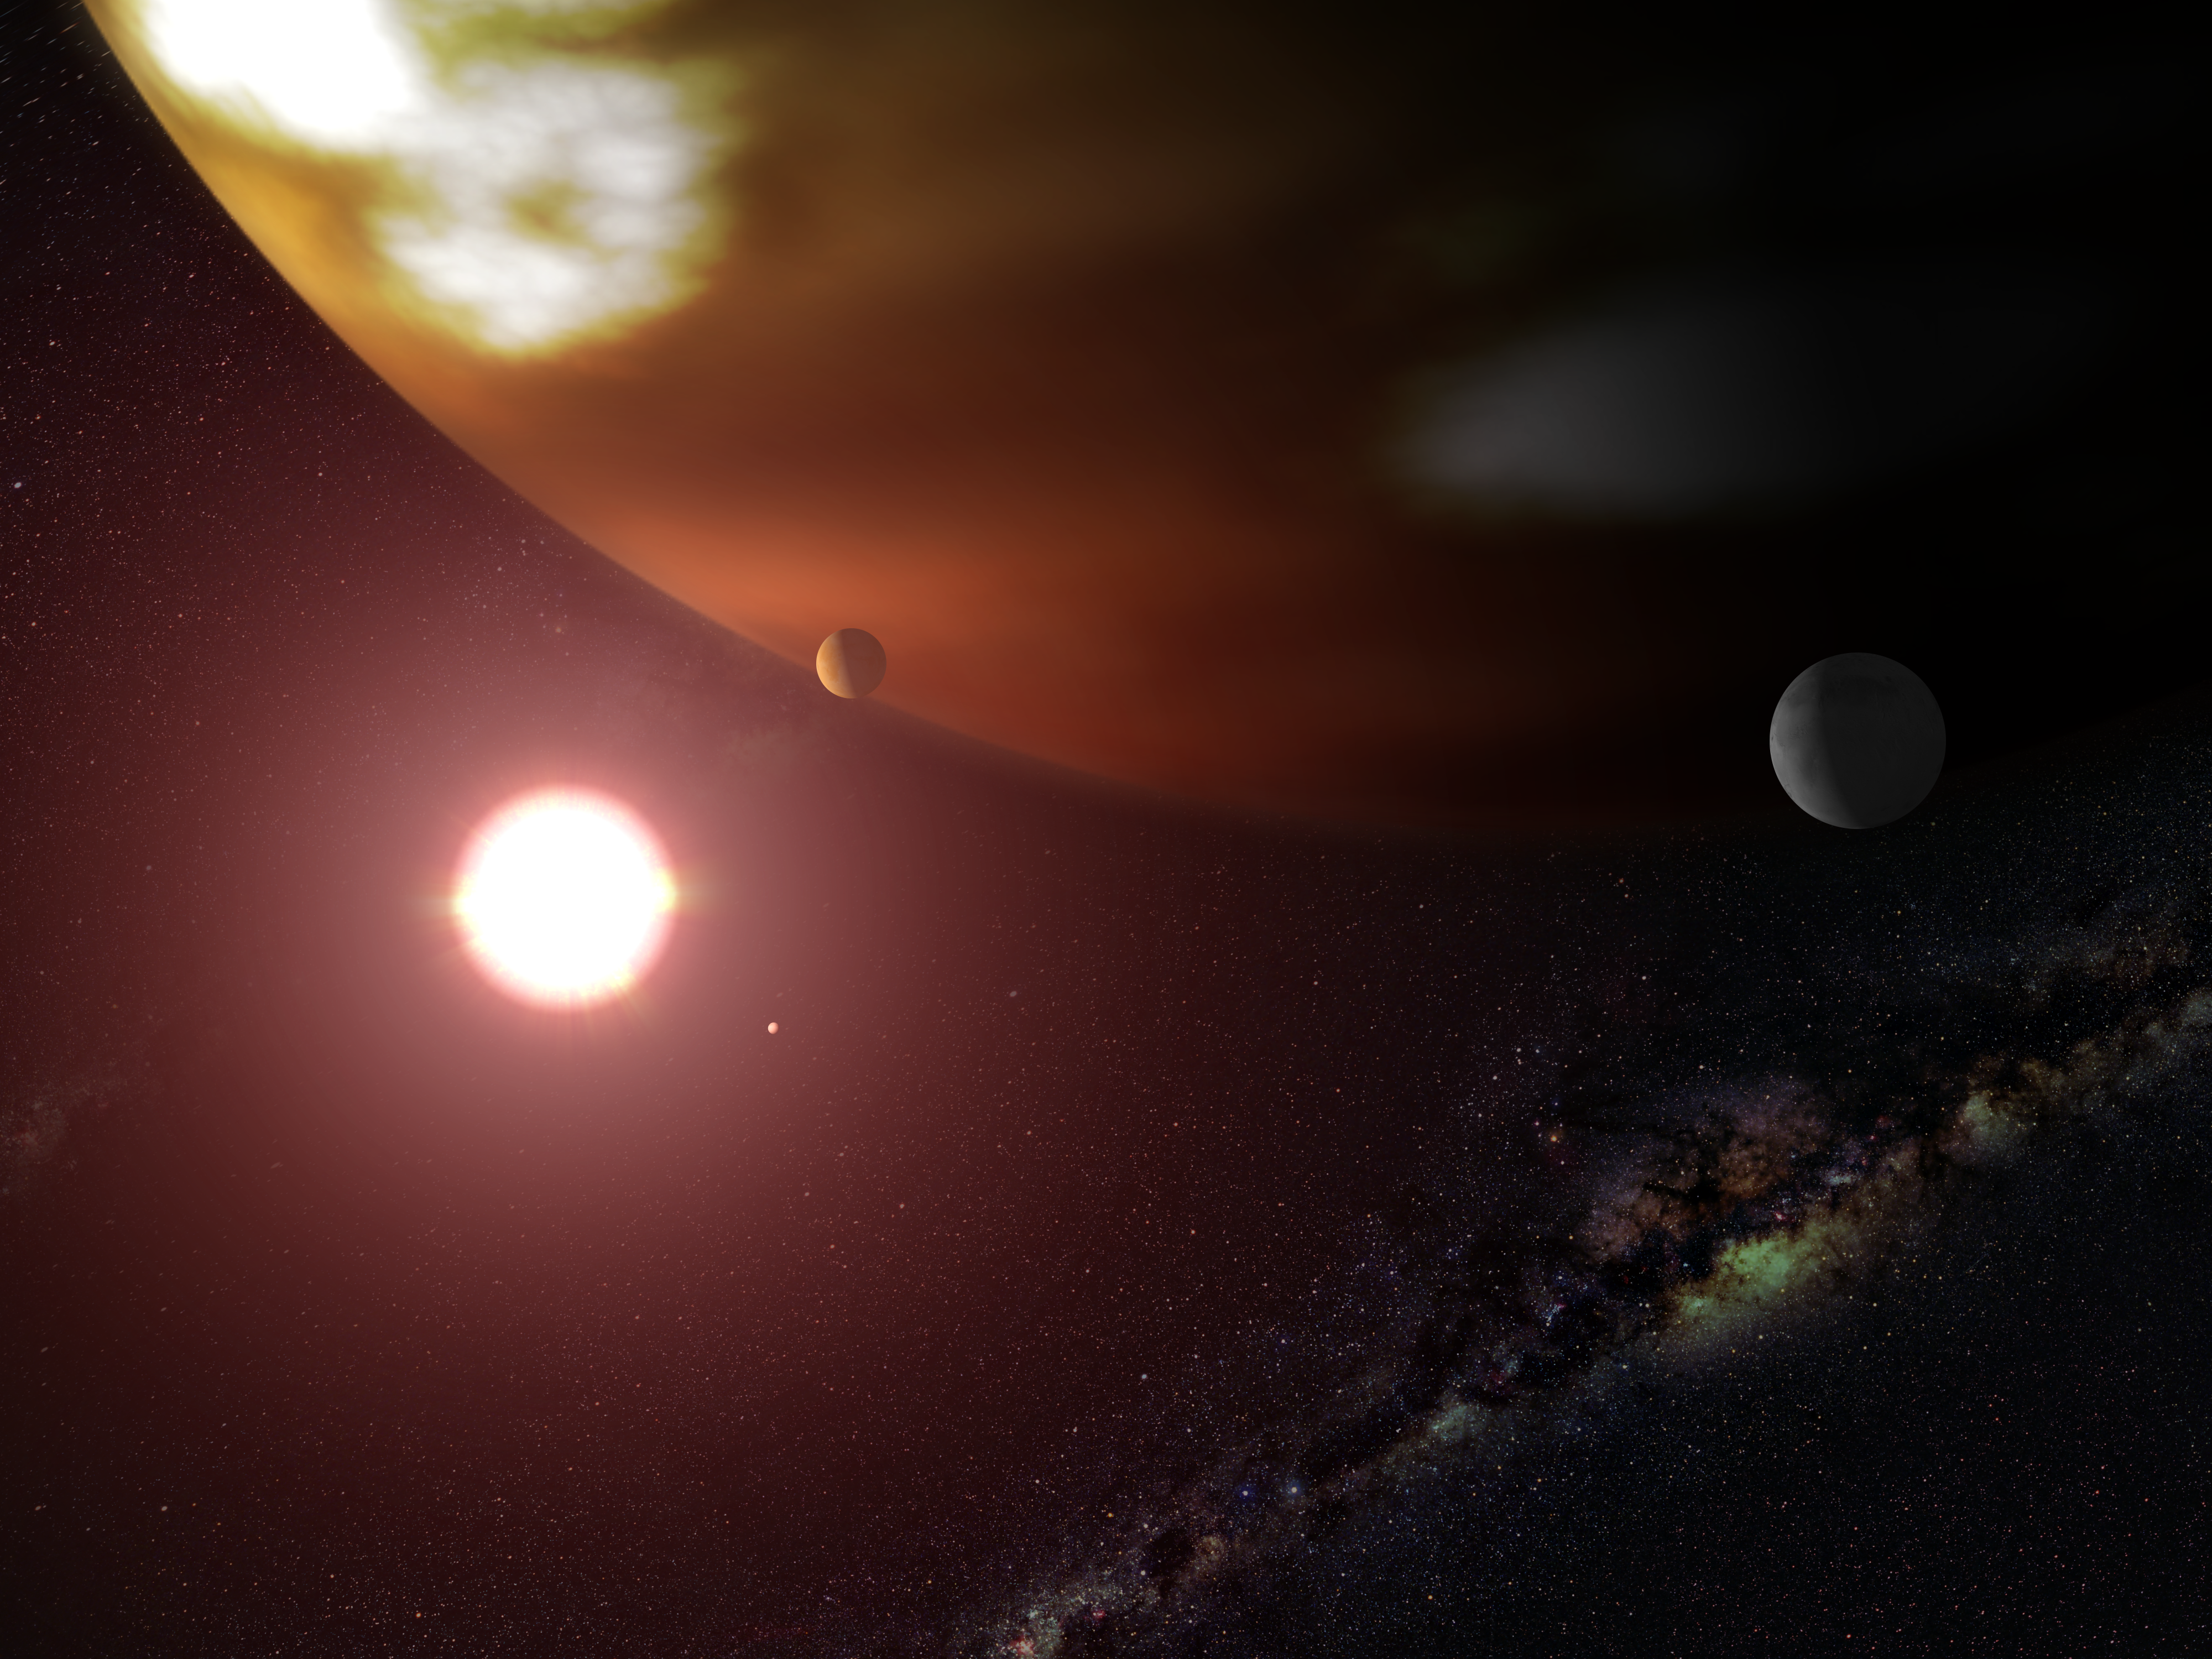

Hubble makes precise measure of extrasolar world's true mass (artist's impression)

An international team of astronomers used the Hubble Space Telescope to help make a precise measurement of the mass of a planet outside our solar system. The Hubble results show that the planet is 1.89 to 2.4 times as massive as Jupiter, our solar system's largest orbiting body. Previous estimates, about which there are some uncertainties, place the planet's mass at a much wider range: between 1.9 and 100 times that of Jupiter's. The planet, called Gliese 876b, orbits the star Gliese 876. It is only the second planet outside our solar system for which astronomers have determined a precise mass.

Credit: NASA/ESA and G. Bacon (STScI)